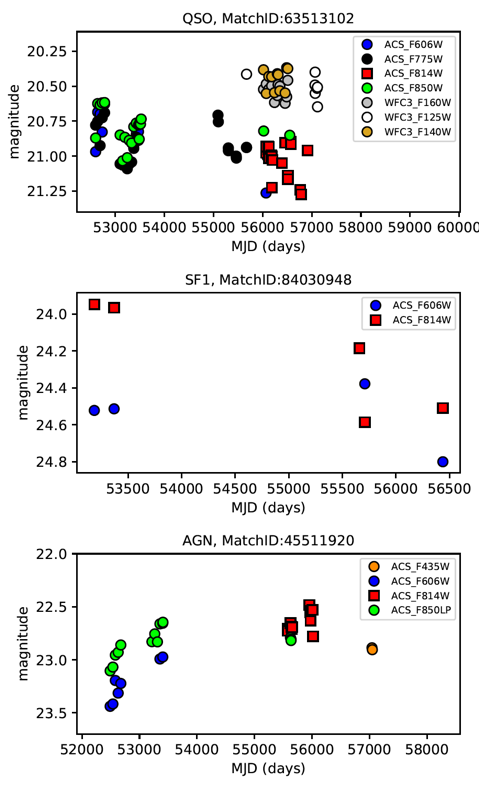

Figure 2: AGN Variability in the CANDELS Fields

HCV light curves of three variable sources in the CANDELS fields: a quasar in GOODS-North (upper panel), a Seyfert-1 in GOODS-South (middle panel), and a new variable AGN in EGS (lower panel).

Credit: ESA/Hubble, A. Bonanos